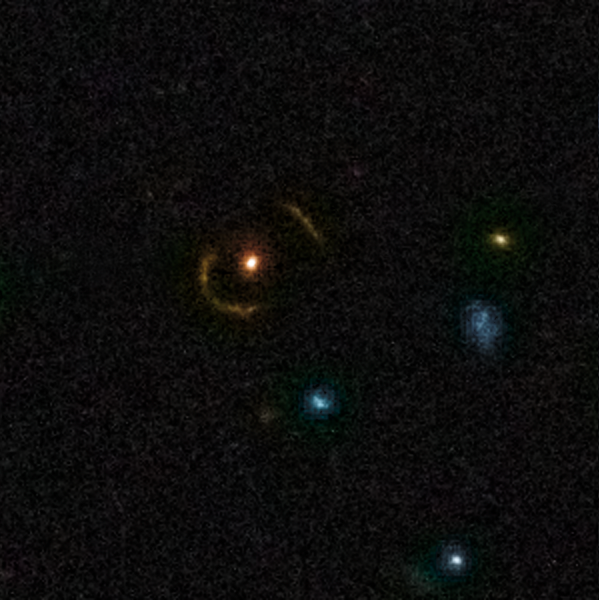

Gravitational Lens 0018+3845

This is a triple gravitational lens, an example of the rich diversity of the 67 strong gravitational lenses found in the COSMOS survey. The lenses were discovered in a recently completed, large set of observations as part of a project to survey a single 1.6-square-degree field of sky (nine times the area of the full Moon) with several space-based and Earth-based observatories.

Gravitational lenses occur when light travelling towards us from a distant galaxy is magnified and distorted as it encounters a massive object between the galaxy and us. These gravitational lenses often allow astronomers to peer much further back into the early Universe than they would normally be able to.

This is a greyscale image taken by Hubble ACS camera and colourised with ground-based data from the CFHT (Canada-France-Hawaii Telescope).

Credit: NASA, ESA, C. Faure (Zentrum für Astronomie, University of Heidelberg) and J.P. Kneib (Laboratoire d'Astrophysique de Marseille)